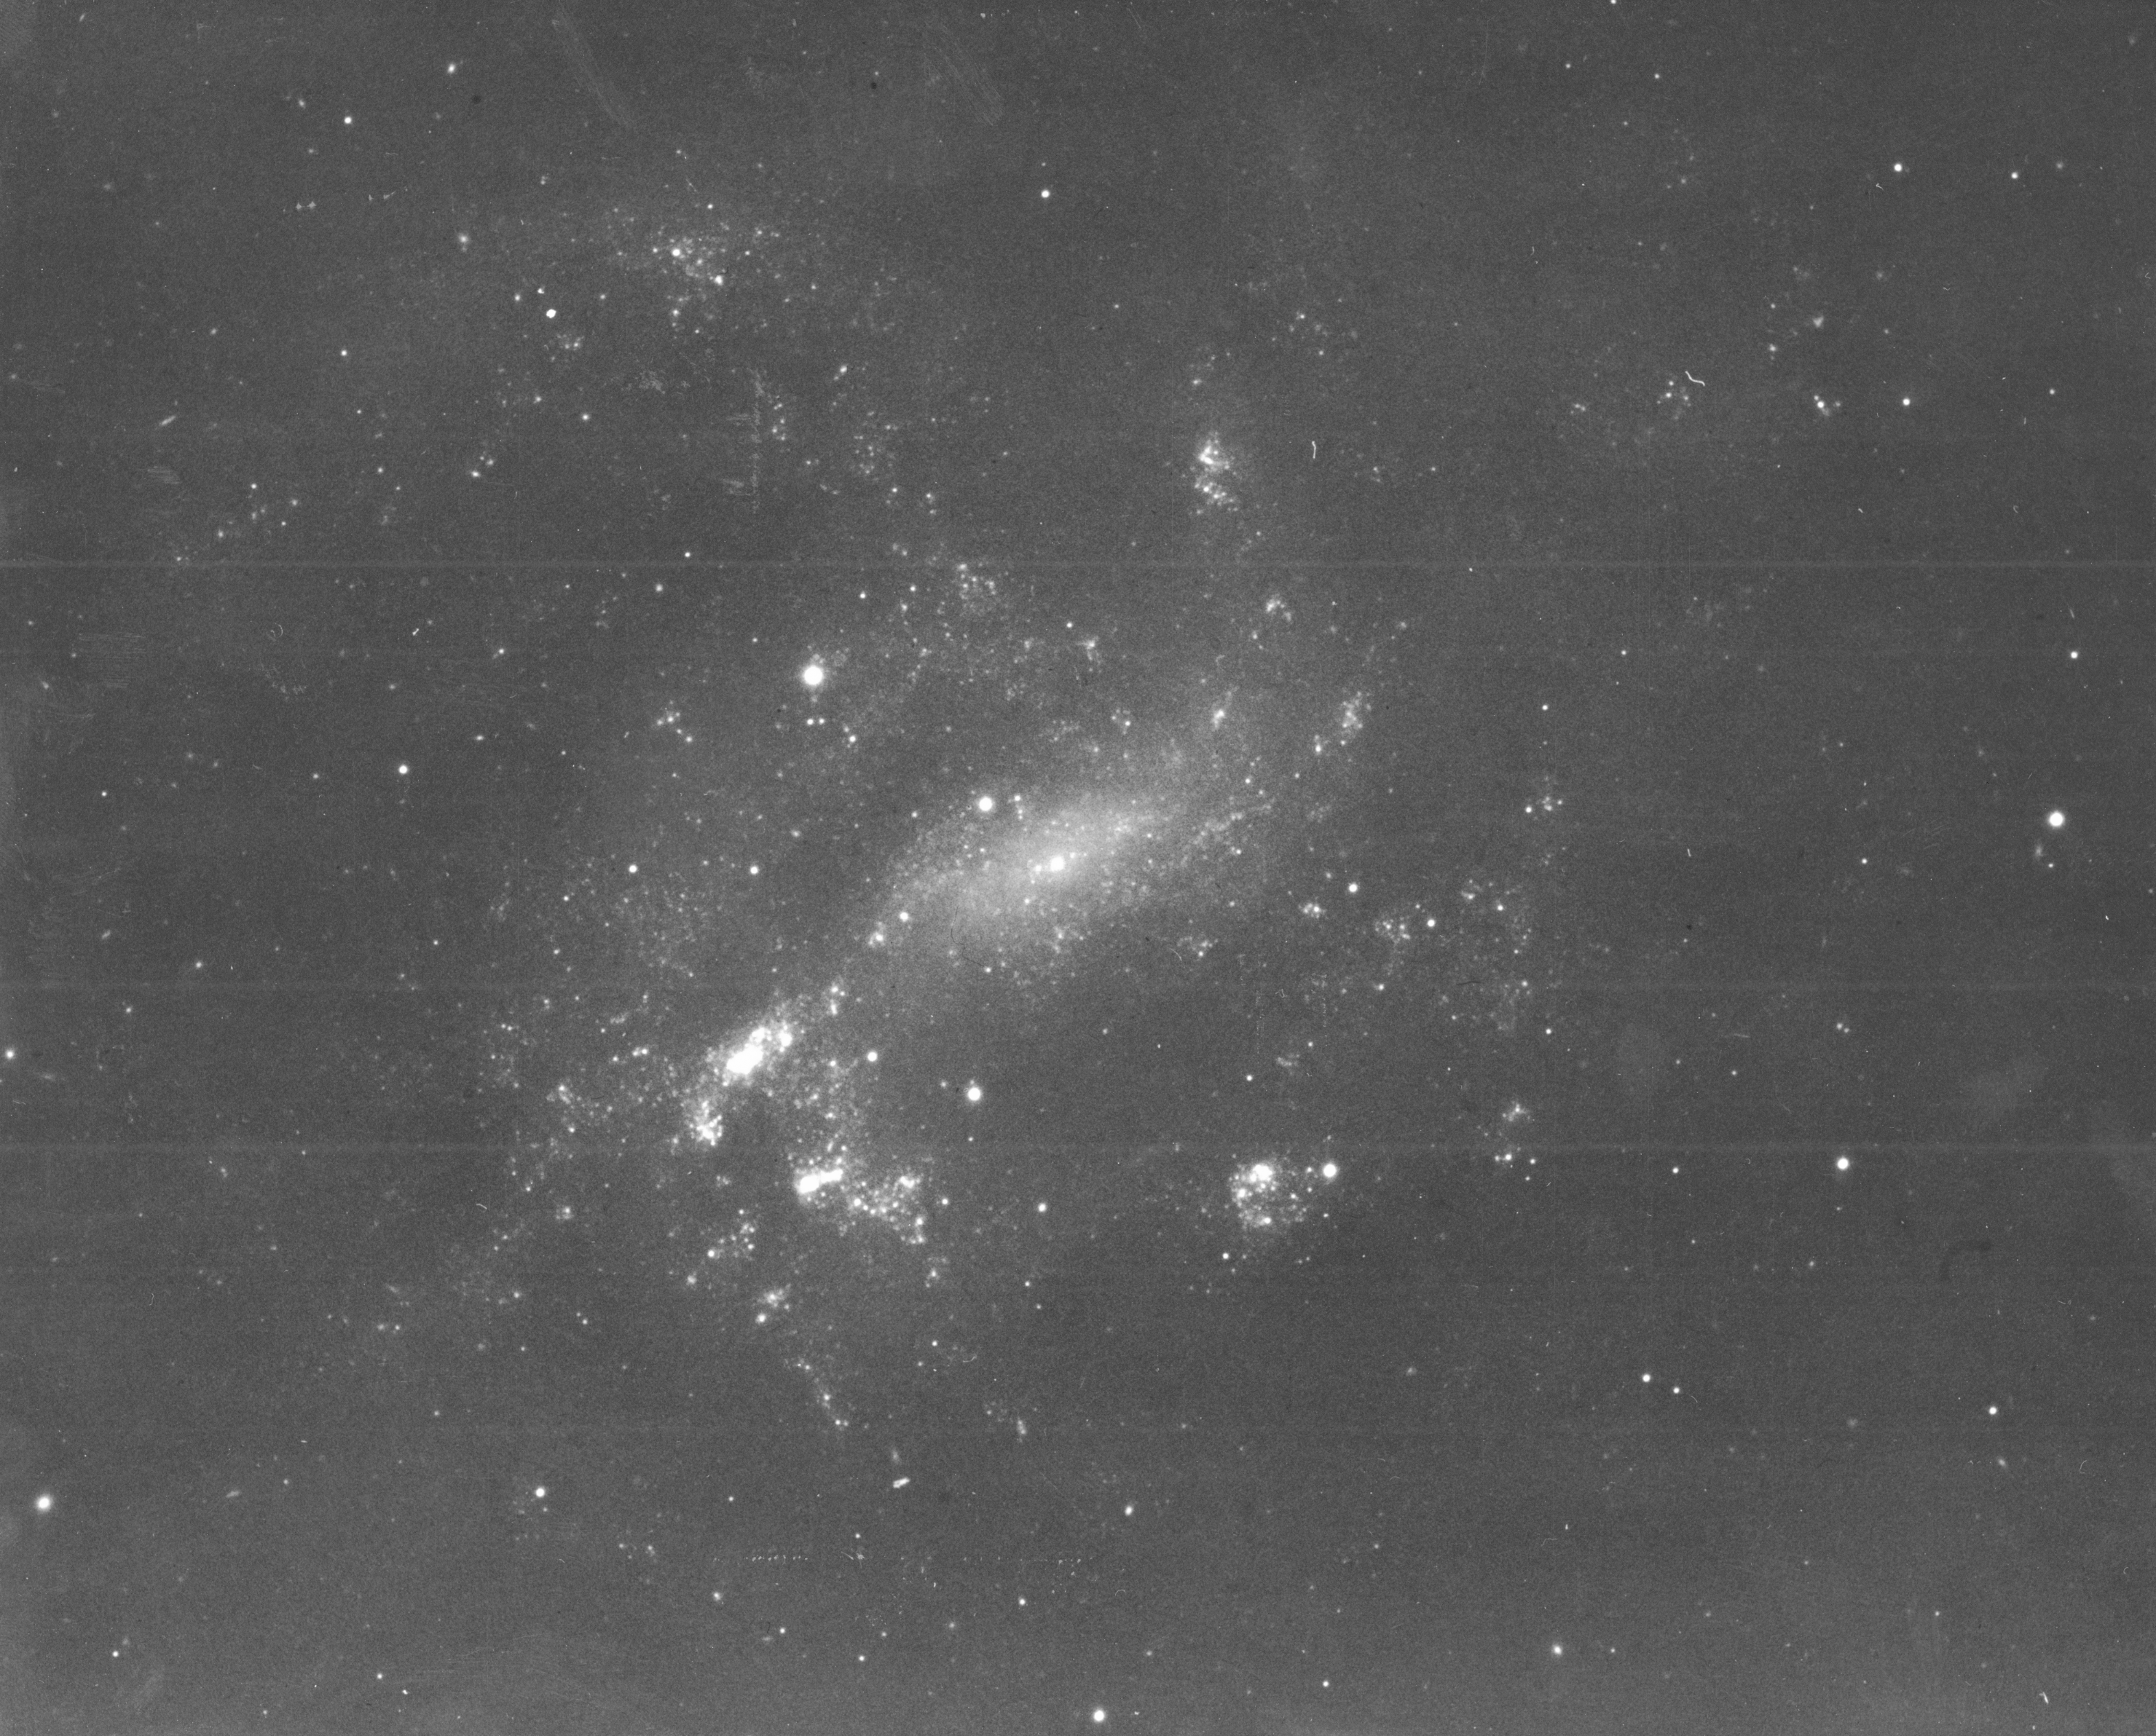

Ground-based image of Seyfert galaxy NGC 4395

This photograph of the nearest Seyfert galaxy, NGC 4395, was taken with the Palomar 200-inch telescope. NGC 4395 is the least luminous and nearest Seyfert galaxy known, located eight million light-years away in the direction of the constellation Canes Venatici (The Hunting Dogs).

A Seyfert galaxy is a class of nearby galaxy that has an extremely bright central region that often obscure the much dimmer stars in the surrounding disk. The nucleus gives off prodigious amounts of energy largely in the form of high-energy x-rays and gamma rays.

Credit: Allan Sandage, Carnegie Institution